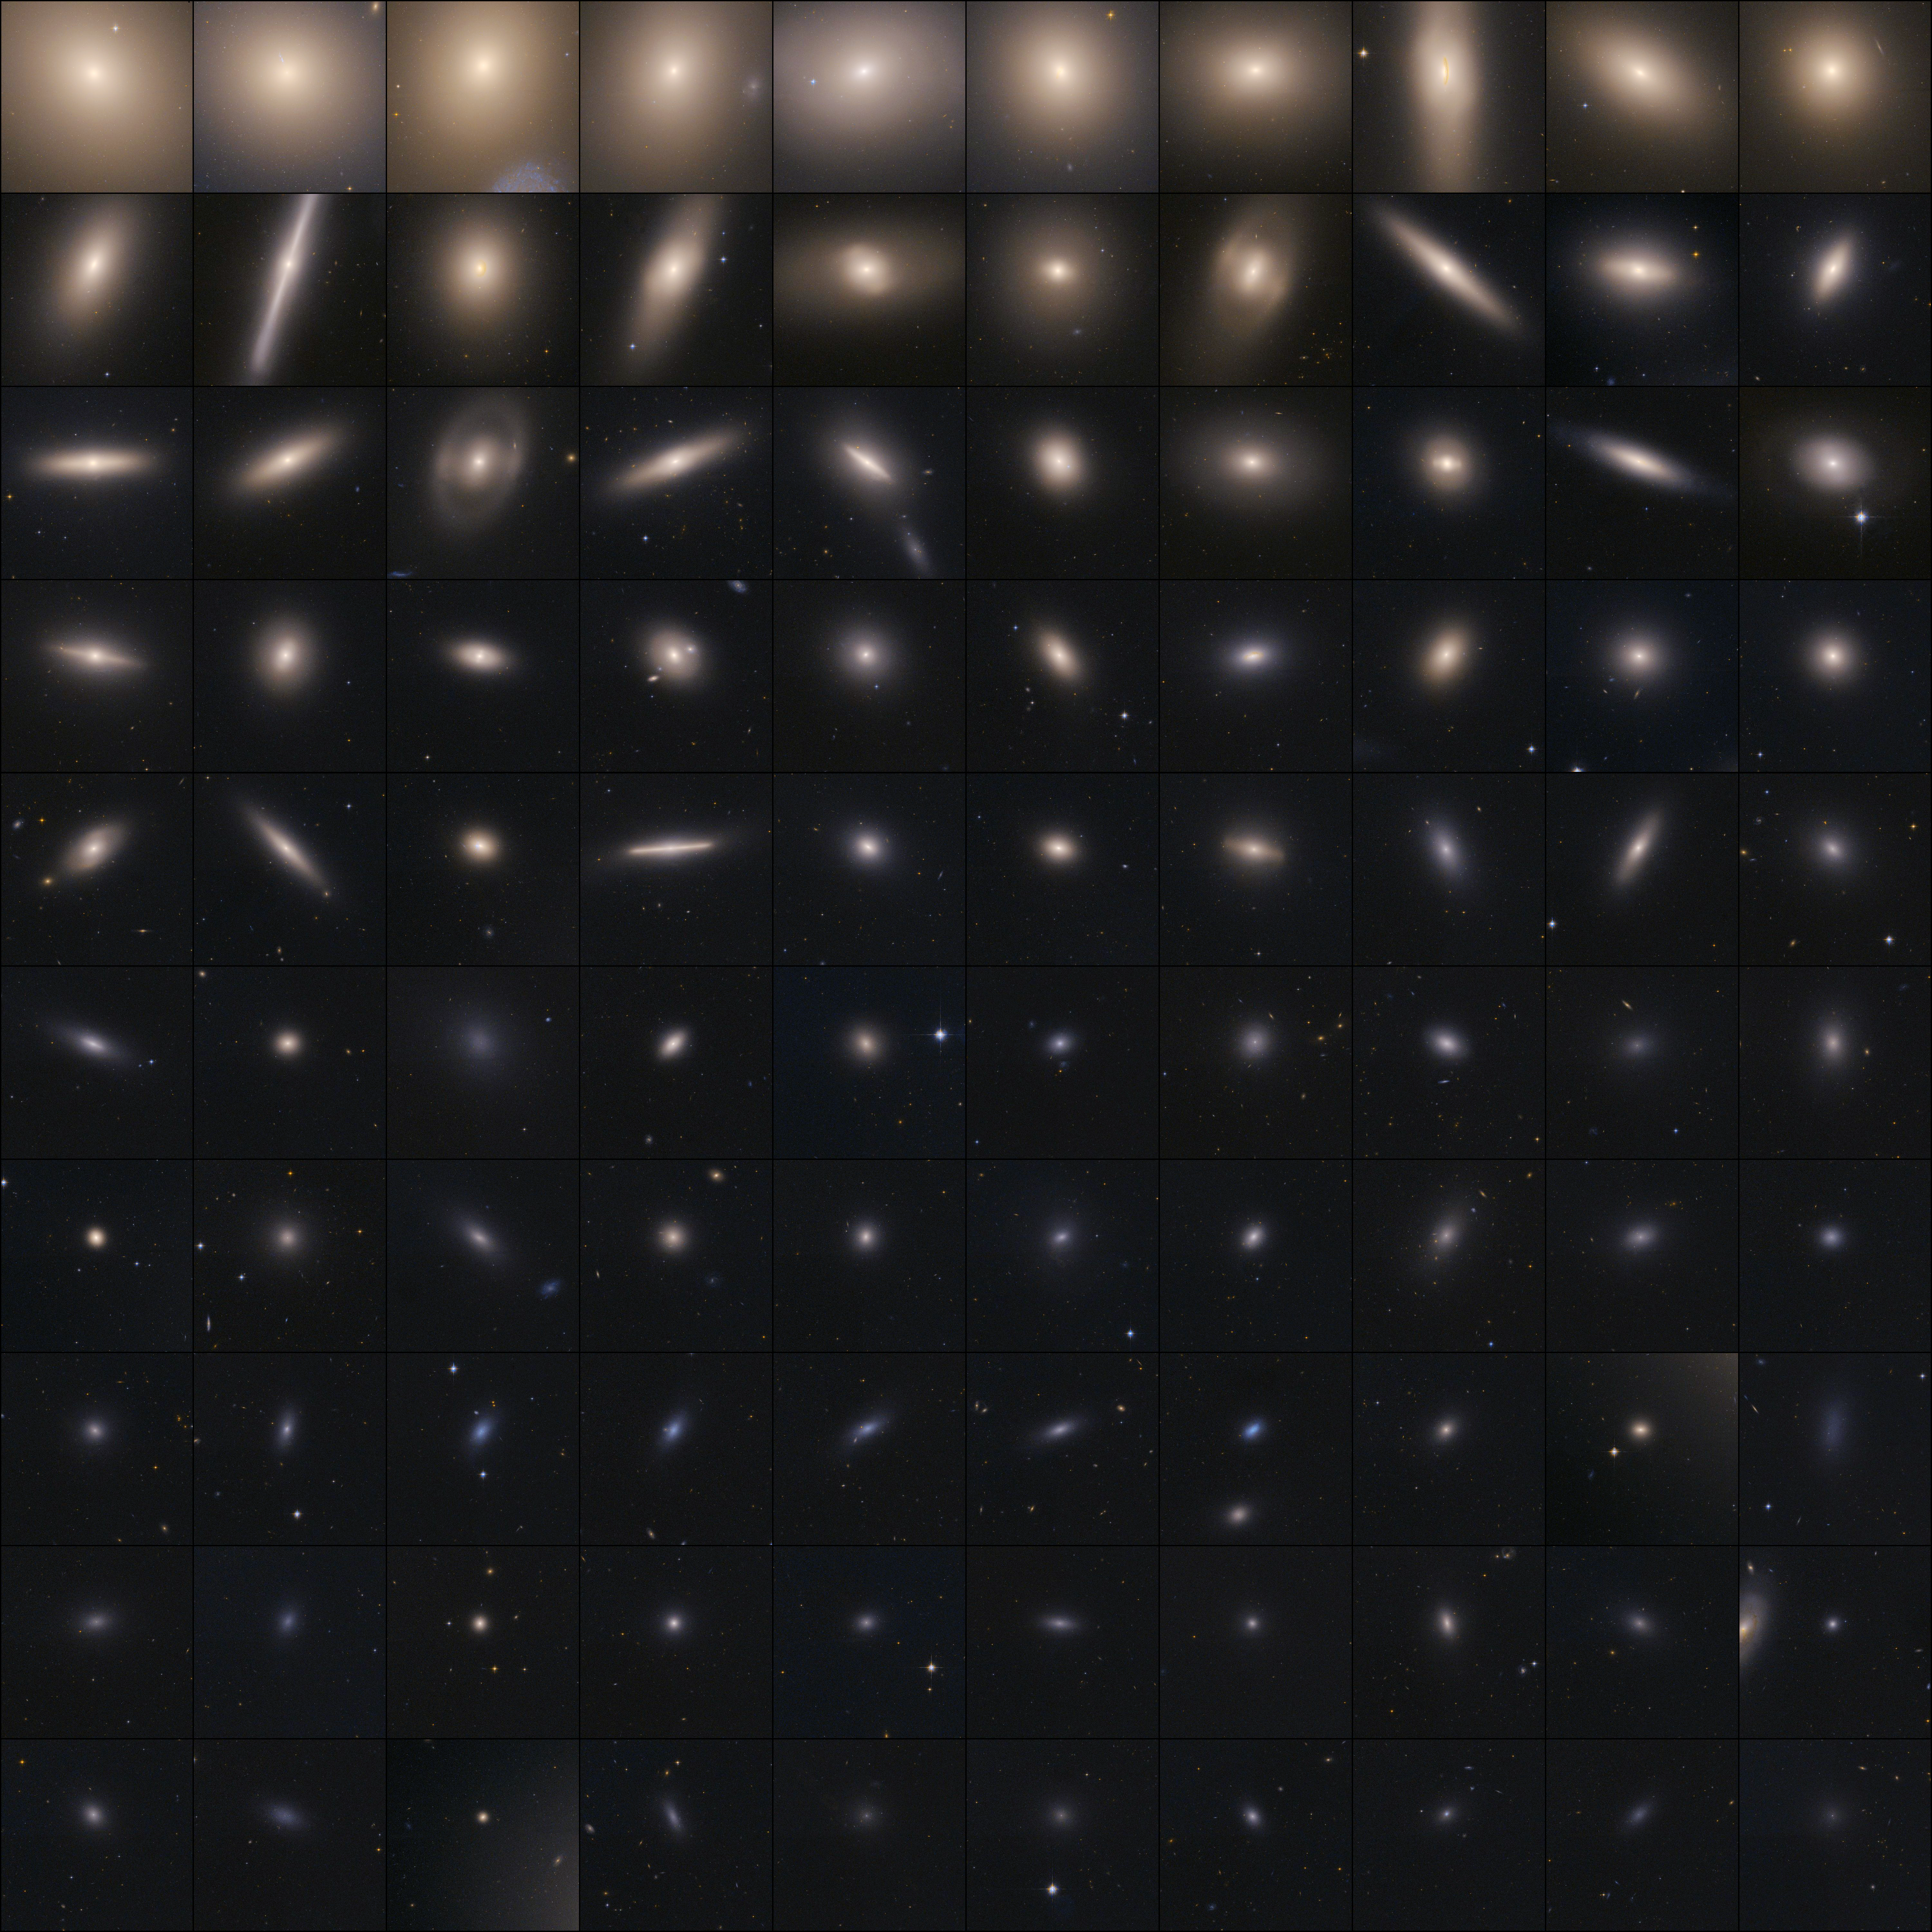

Virgo cluster galaxies and their globular star clusters

These images taken by the NASA/ESA Hubble Space Telescope show the globular cluster systems of 100 galaxies observed within the Advanced Camera for Surveys (ACS) Virgo Cluster Survey. Globular clusters, dense bunches of hundreds of thousands of stars, have some of the oldest surviving stars in the Universe. Most of the star clusters in the Virgo survey are older than 5 billion years. The Hubble study found evidence that these globular clusters are more likely to form in dense areas where star birth occurs at a rapid rate, instead of uniformly from galaxy to galaxy. Comprised of over 2,000 galaxies and located about 54 million light-years away, the Virgo cluster is the nearest large galaxy cluster to Earth. These composite images were made from the advanced camera's full field-of-view observations. Astronomers also used modeling data to fill in a narrow gap between the camera's detectors. The images were taken from December 2002 to December 2003.

Credit: NASA, ESA, and E. Peng (Peking University, Beijing)